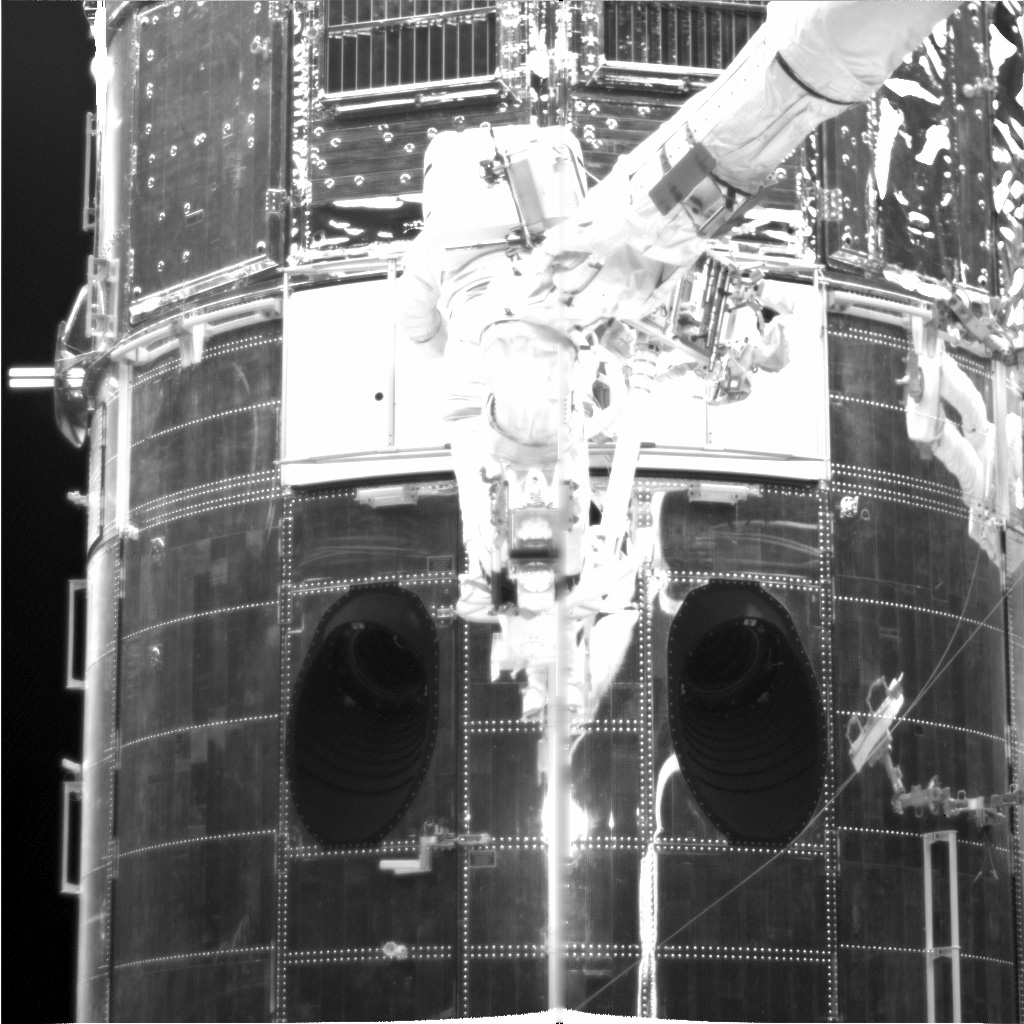

WFPC Camera Insertion

In this image we see the WFPC Camera being inserted and installed.

Credit: NASA/ESA